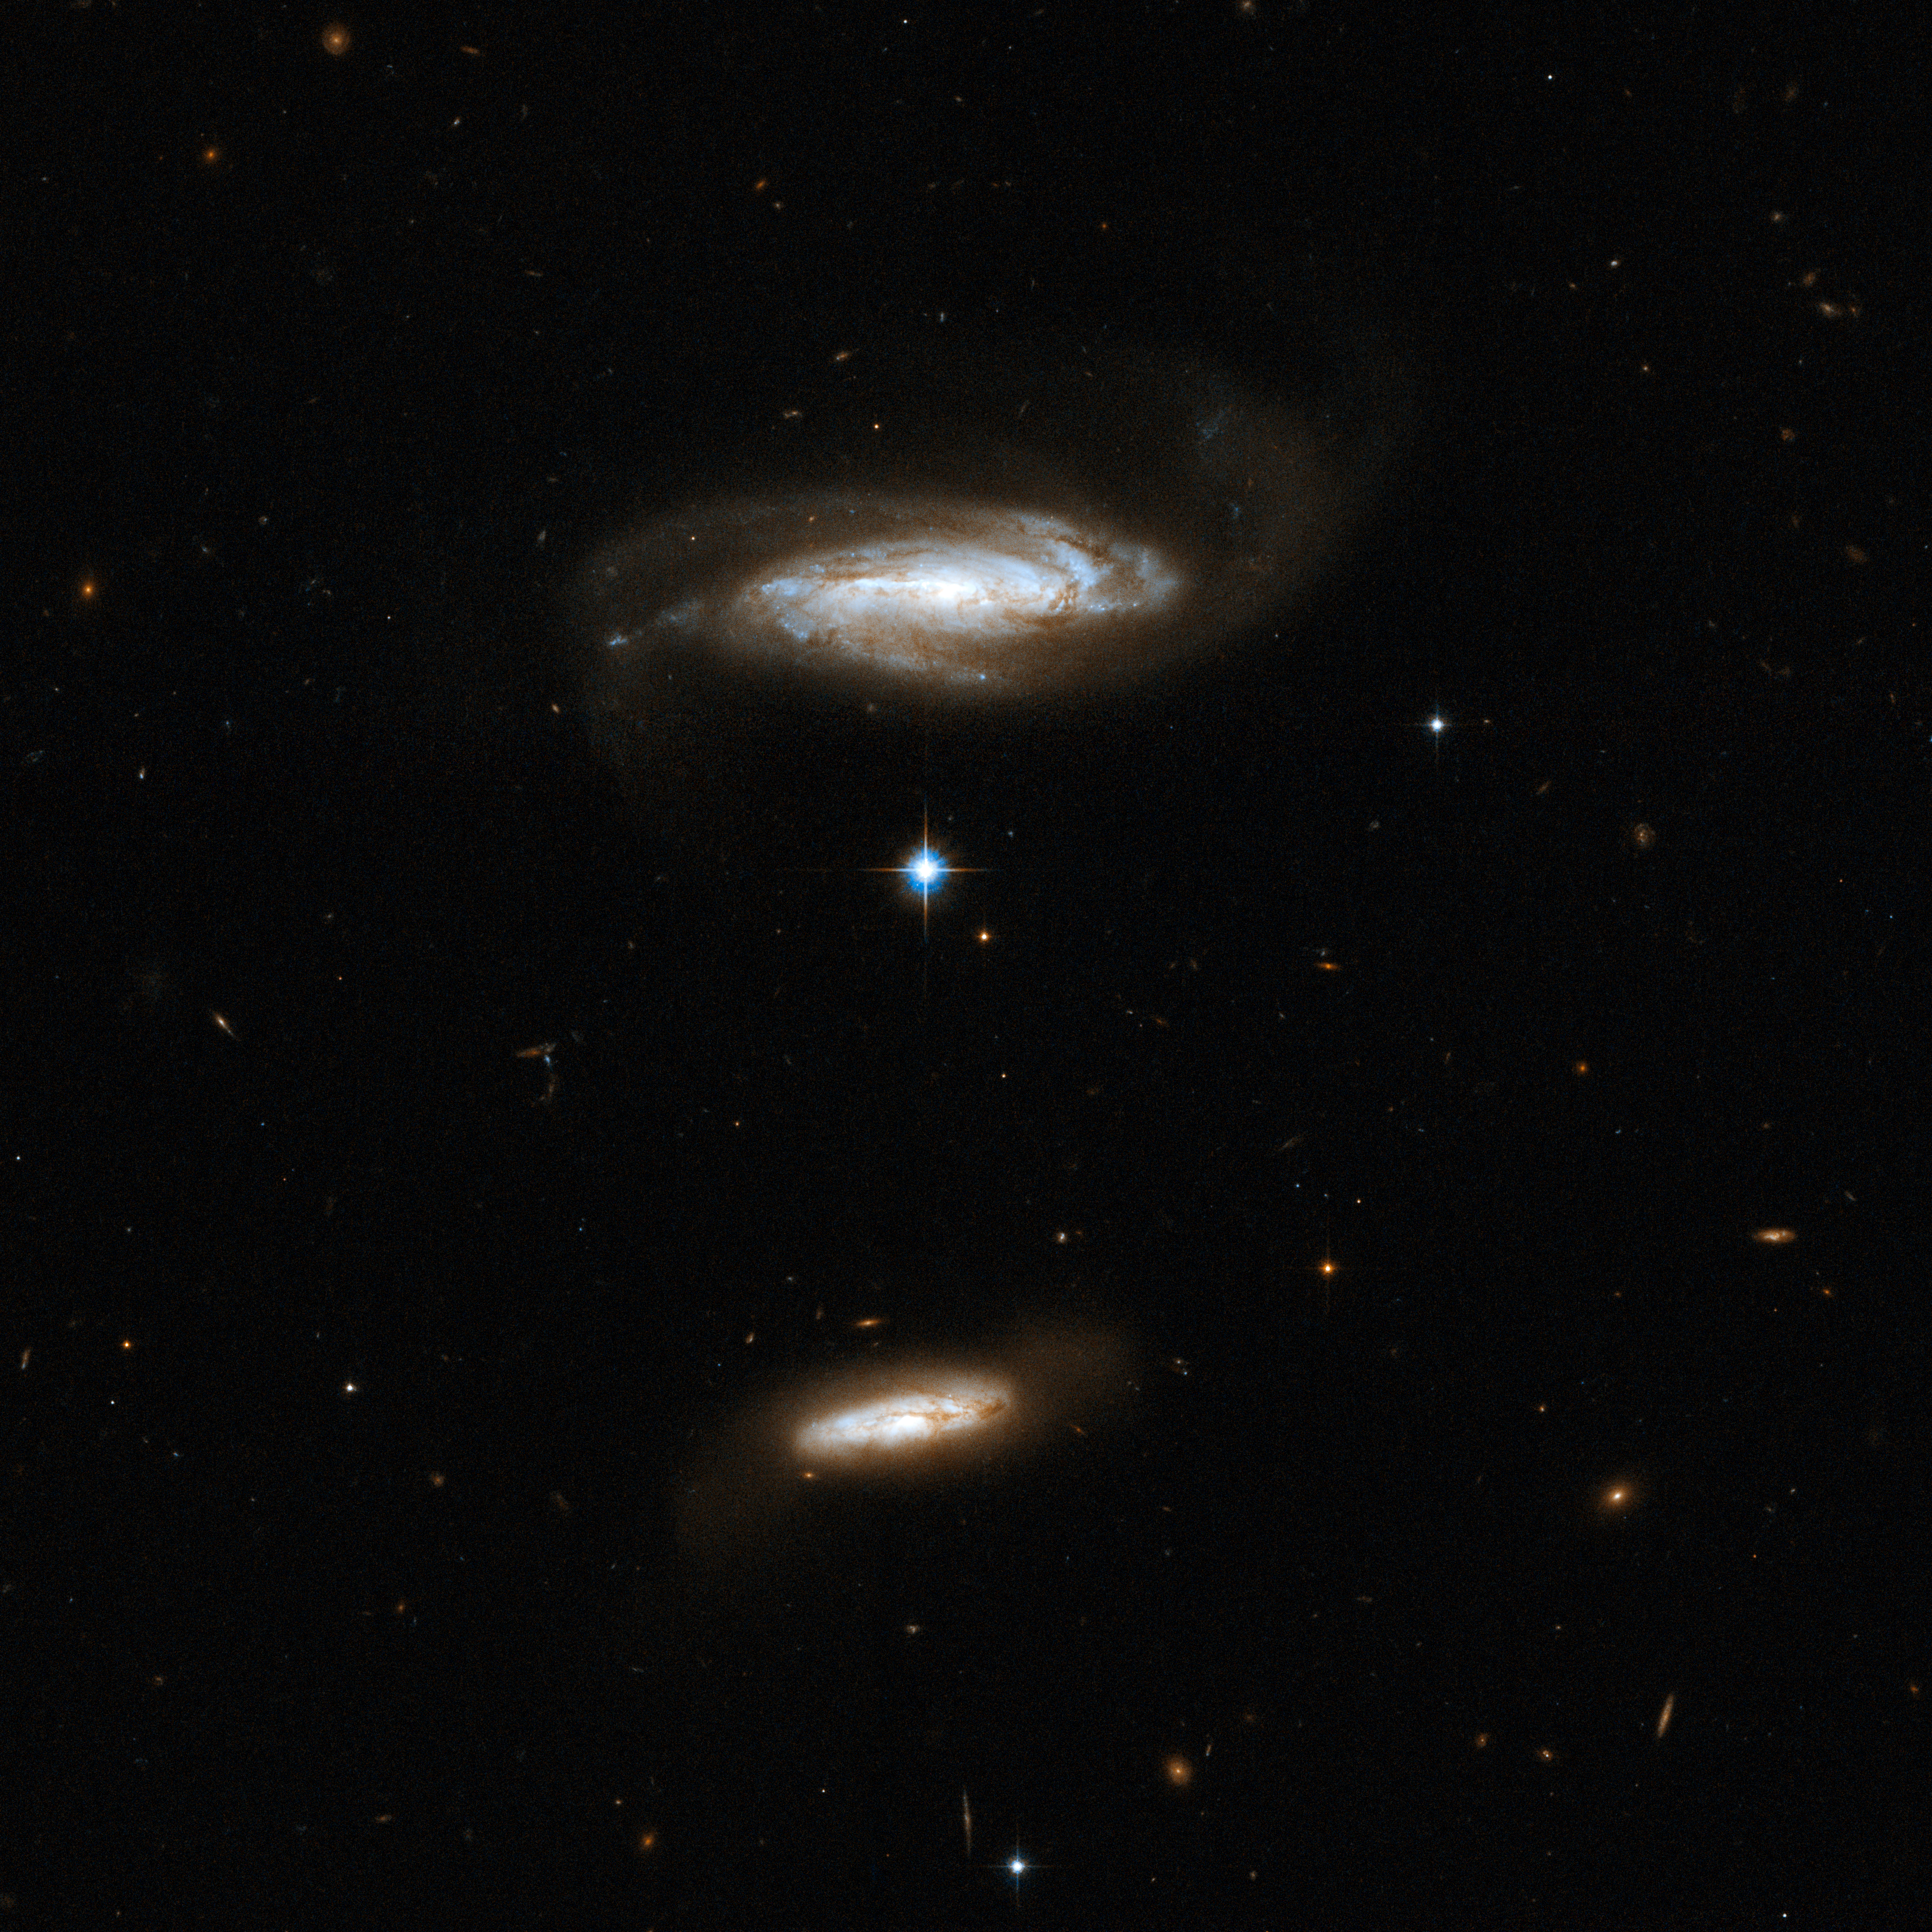

IC 2810

IC 2810 is a disc galaxy viewed nearly edge-on. It is slightly disturbed by gravitational interaction with a smaller, dusty companion (located to the bottom of the image). The larger galaxy shows blue knots of star formation. Although the pair has no overlapping region at present, it is possible that the two will eventually collide in the future. IC 2810 is located in the constellation of Leo, the Lion, about 450 million light-years away.

This image is part of a large collection of 59 images of merging galaxies taken by the Hubble Space Telescope and released on the occasion of its 18th anniversary on 24th April 2008.

Credit: NASA, ESA, the Hubble Heritage Team (STScI/AURA)-ESA/Hubble Collaboration and A. Evans (University of Virginia, Charlottesville/NRAO/Stony Brook University)